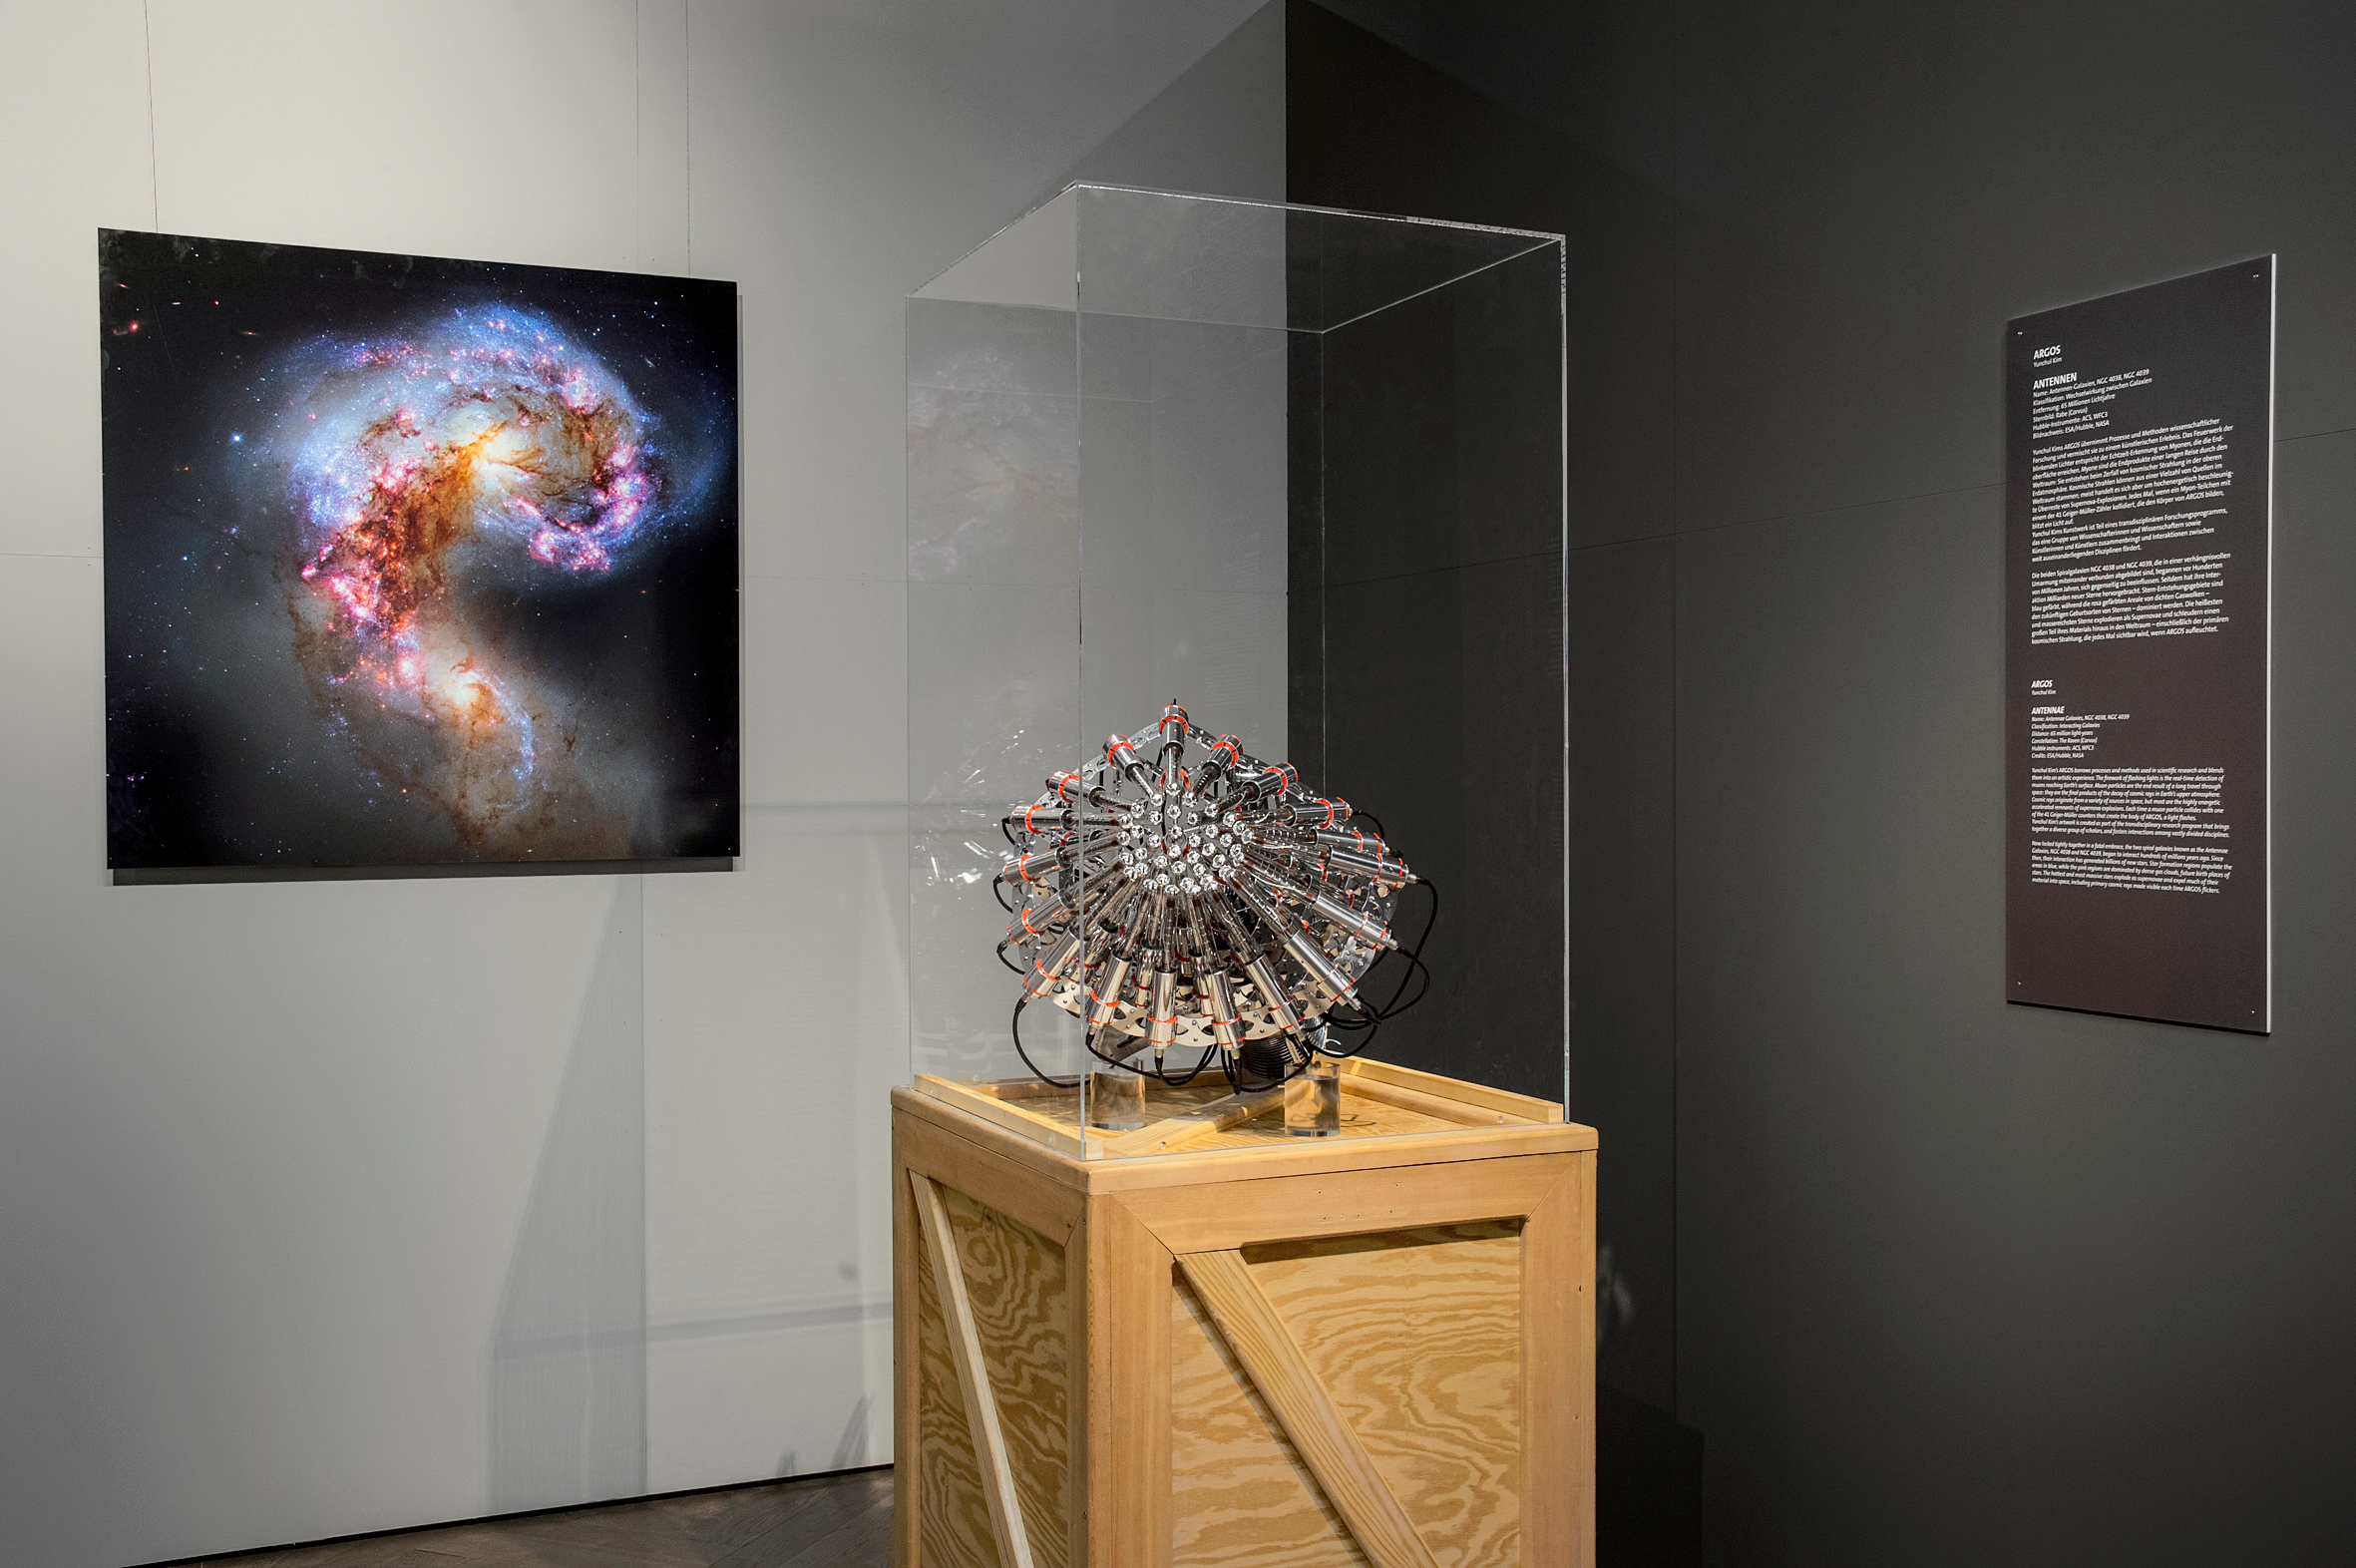

Our Place in Space — ARGOS

Yunchul Kim's ARGOS takes processes and methods of scientific research and mixes them into an artistic experience. The fireworks of flashing lights visible in his installation correspond to real time detection of muons reaching Earth's surface.

Muons are created by decay of cosmic radiation in the upper atmosphere. Cosmic rays can come from a variety of sources in space; but most of them are high-energy remnants of supernovae explosions. Every time a muon collides with one of the 41 Geier-Müller counters in the ARGOS installation, a light flashes.

The installation is part of the Hubble travelling exhibition Our Place in Space.

Credit: NHM Wien, Kurt Kracher